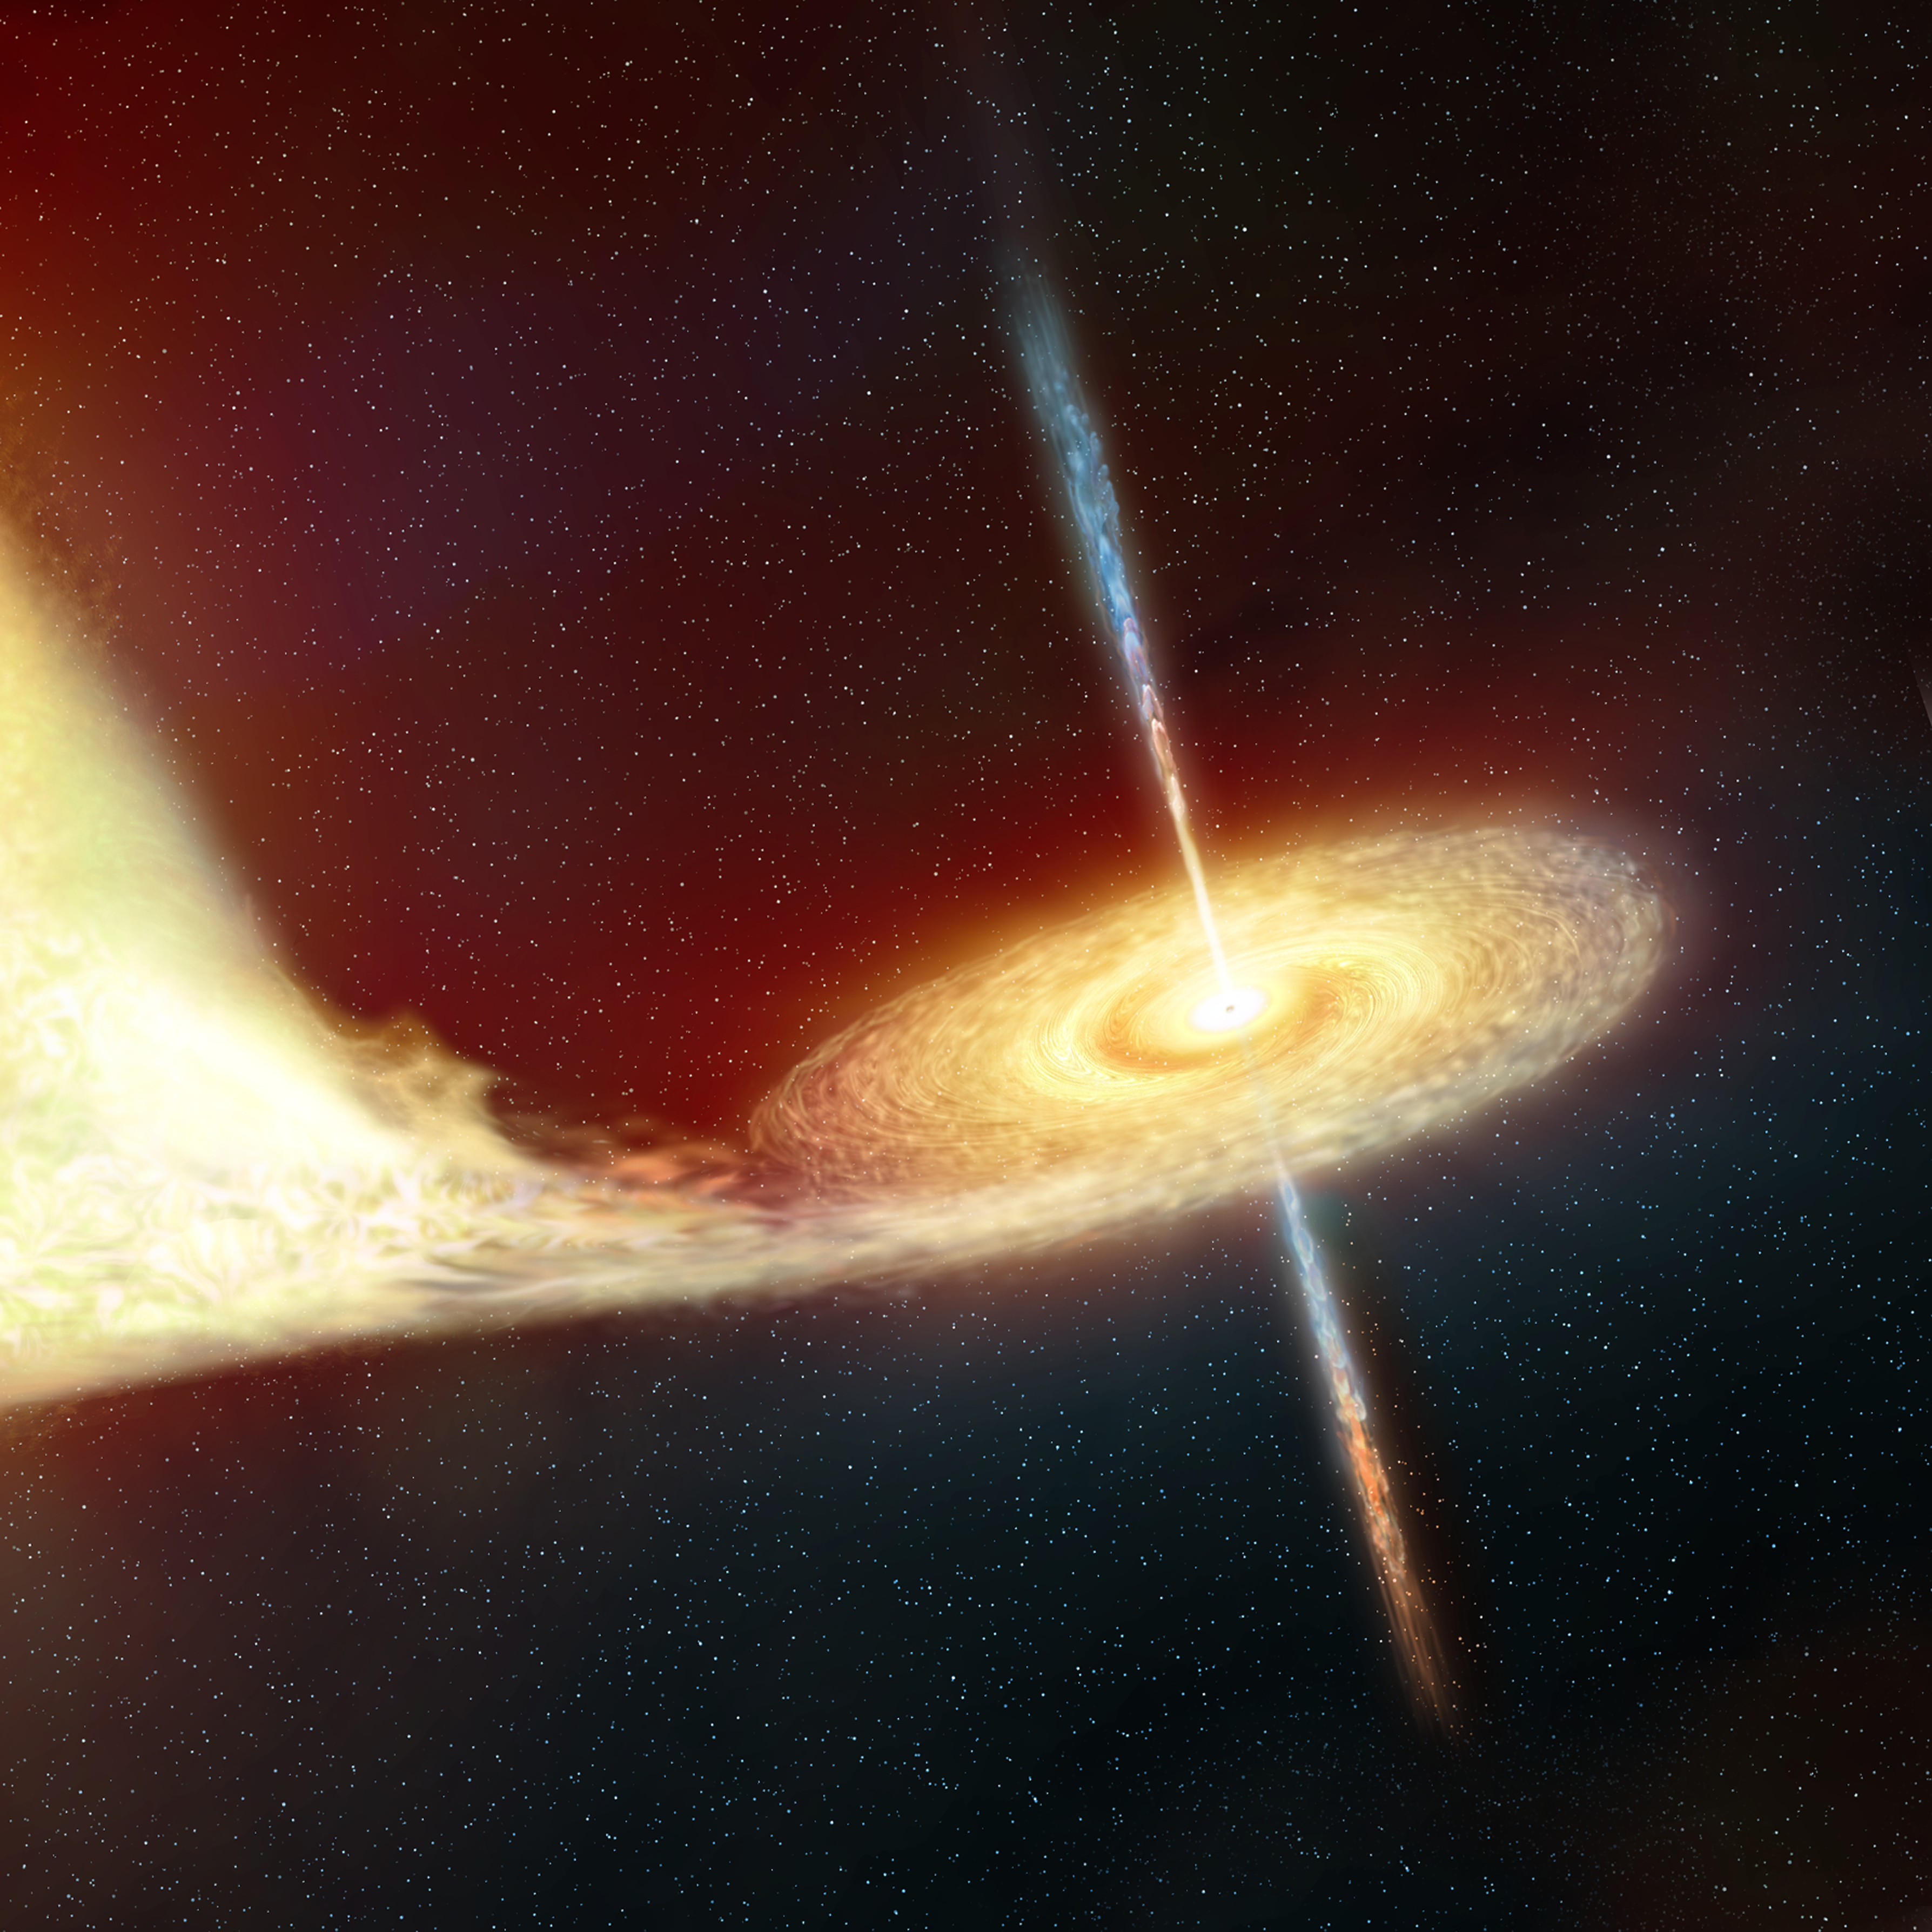

Artist's impression of a black hole

Artist's impression of a black hole.

Credit: NASA, ESA, Martin Kornmesser (ESA/Hubble)